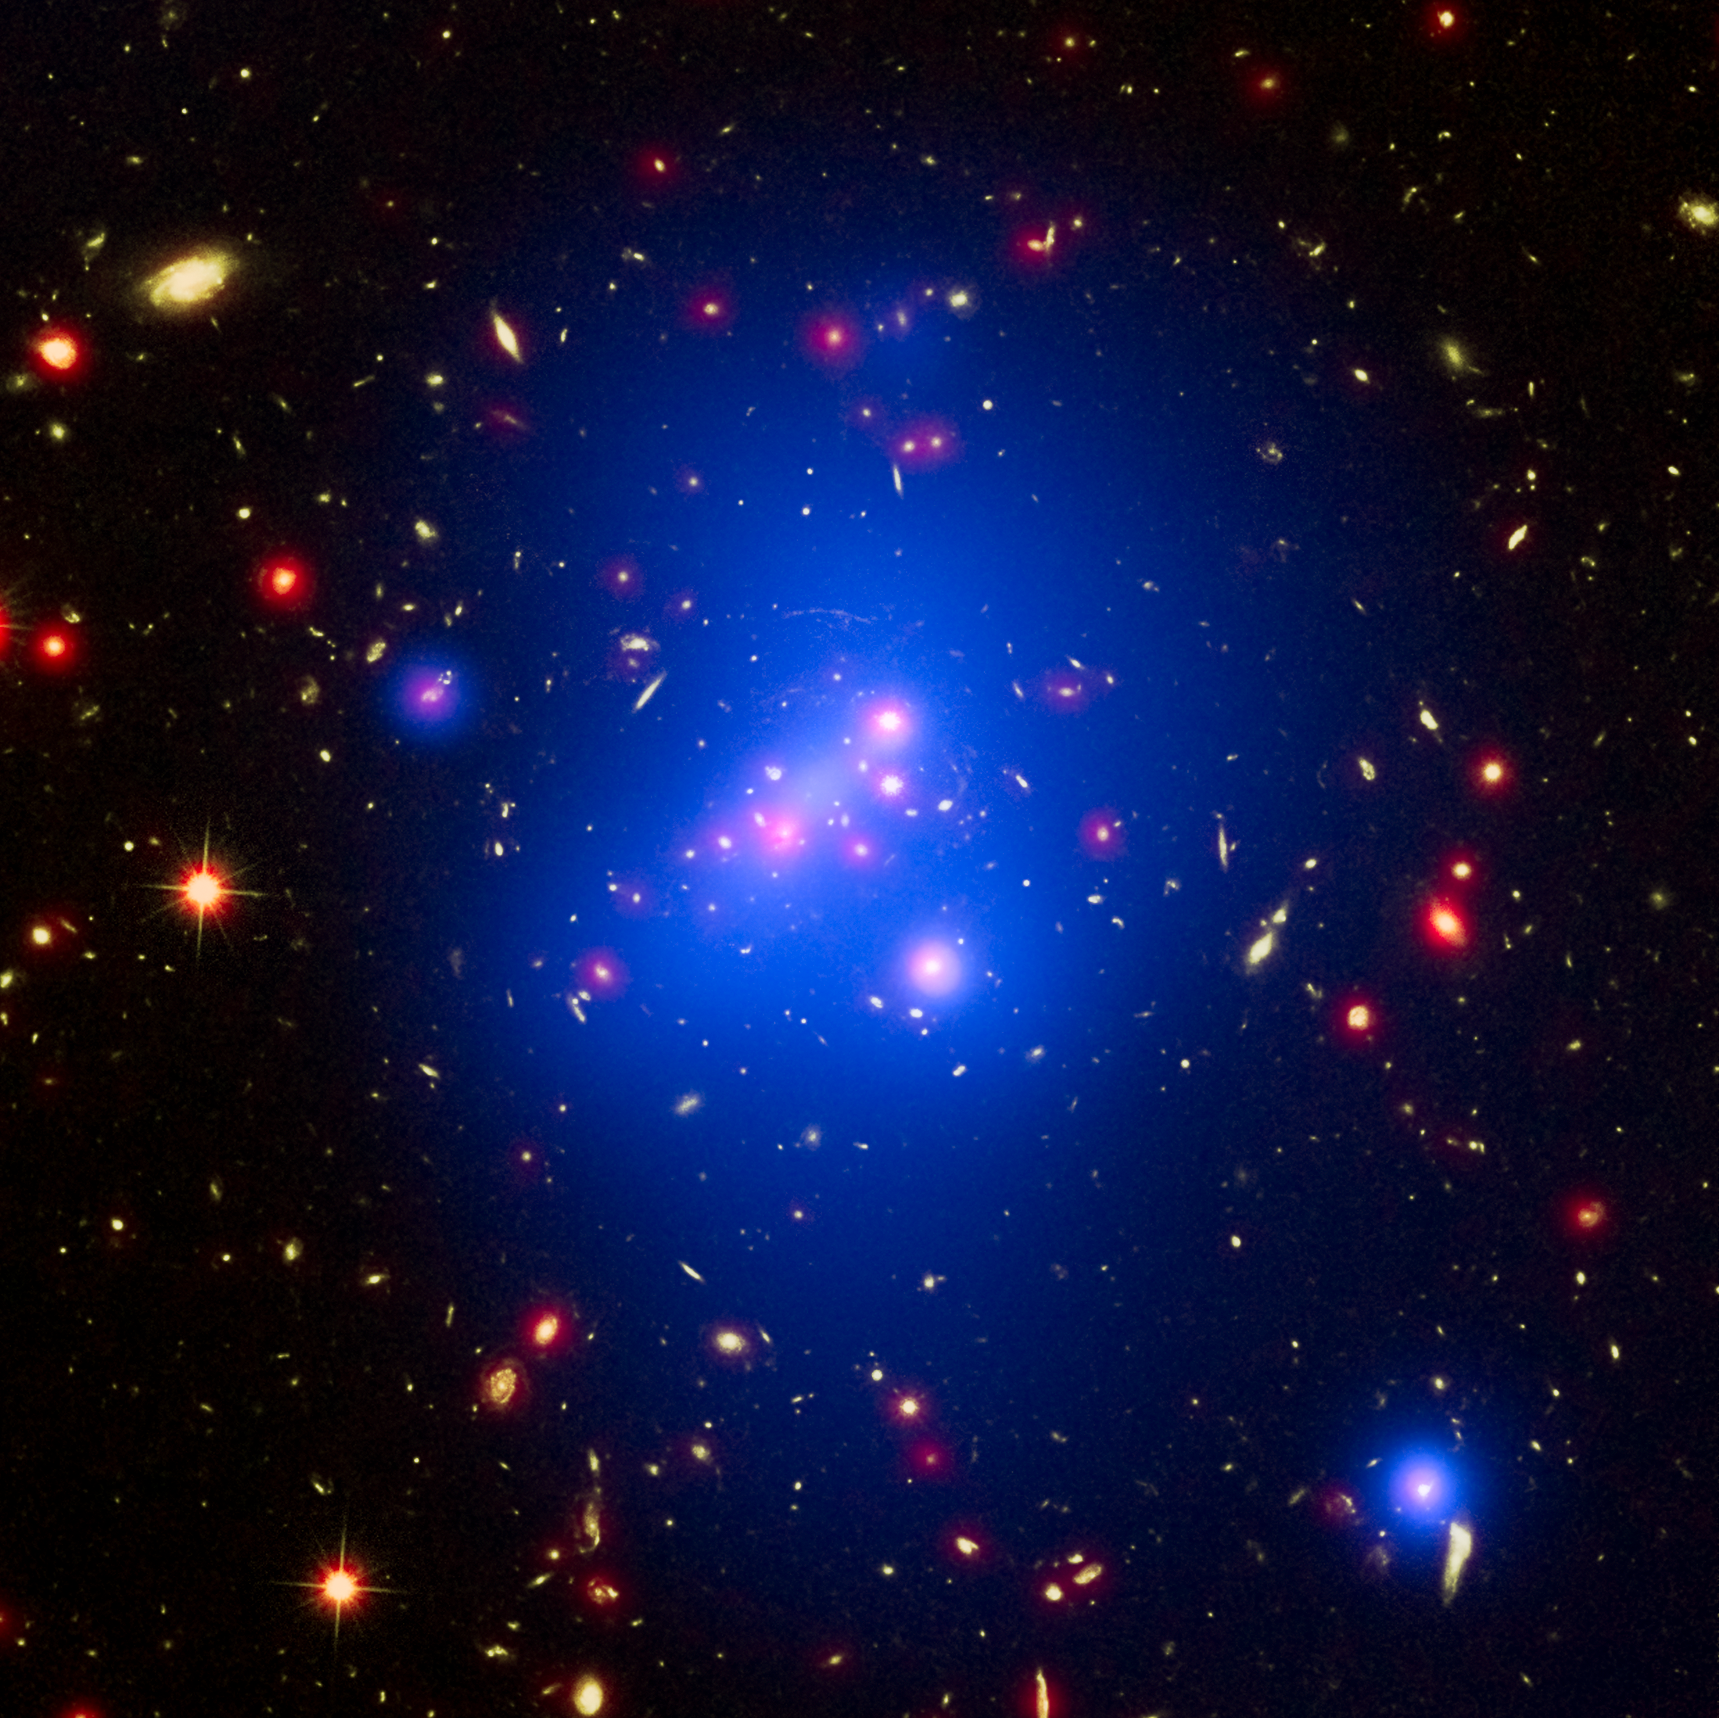

Galaxy cluster IDCS J1426

Astronomers have made the most detailed study yet of an extremely massive young galaxy cluster using three space telescopes. This multi-wavelength image shows this galaxy cluster, called IDCS J1426.5+3508 (IDCS 1426 for short), in X-rays from the NASA Chandra X-ray Observatory in blue, visible light from the NASA/ESA Hubble Space Telescope in green, and infrared light from the NASA Spitzer Space Telescope in red.

This rare galaxy cluster, which is located 10 billion light-years from Earth, weighs almost 500 trillion suns. This object has important implications for understanding how these megastructures formed and evolved early in the Universe. Astronomers have observed IDCS 1426 when the Universe was less than a third of its current age. It is the most massive galaxy cluster detected at such an early age.

First discovered by the Spitzer Space Telescope in 2012, IDCS 1426 was then observed using the Hubble Space Telescope and the Keck Observatory to determine its distance. Observations from the Combined Array for Millimeter Wave Astronomy indicated it was extremely massive. New data from the Chandra X-ray Observatory confirm the galaxy cluster mass and show that about 90 percent of the mass of the cluster is in the form of dark matter, the mysterious substance that has so far been detected only through its gravitational pull on normal matter composed of atoms.

There is a region of bright X-ray emission (seen as blue-white) near the middle of the cluster, but not exactly at the centre. The location of this "core" of gas suggests that the cluster has had a collision or interaction with another massive system of galaxies relatively recently, perhaps within about the last 500 million years. This would cause the core to "slosh" around like wine in a moving glass and become offset as it appears to be in the Chandra data. Such a merger would not be surprising, given that astronomers are observing IDCS 1426 when the universe was only 3.8 billion years old. So that an enormous structure can form so rapidly, scientists think mergers with smaller clusters would likely play a role in a large cluster's growth.

This core, while still extremely hot, contains cooler gas than its surroundings. This is the most distant galaxy cluster where such a "cool core" of gas has been observed. Astronomers think these cool cores are important in understanding how quickly hot gas cools off in clusters, influencing the rate of stars at which stars are born. This cooling rate can be slowed down by outbursts from a supermassive black hole in the centre of the cluster. Apart from the cool core, the hot gas in the cluster is remarkably symmetrical and smooth. This is another piece of evidence that IDCS 1426 formed very rapidly and quickly in the early Universe. Despite the high mass and rapid evolution of this cluster, its existence does not pose a threat to the standard model of cosmology.

These results were presented at the 227th meeting of the American Astronomical Society meeting in Kissimmee, Florida.

Credit: NASA, ESA, and M. Brodwin (University of Missouri)